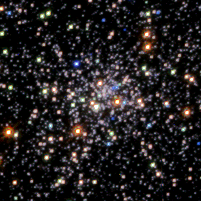

Globular Cluster M 15

This mosaic of the globular cluster M15 (fifteenth object in the Messier catalog of star clusters and nebulae) contains over 30, 000 stars. The Hubble Space Telescope probed the core of M15, the most tightly packed cluster of stars in our galaxy, to look for evidence of either a massive black hole or another remarkable phenomenon: a 'core collapse' driven by the intense gravitational pull of so many stars in such a small volume of space.

Credit: P. Guhathakurta (UCO/Lick Observatory, UC Santa Cruz), B. Yanny (Fermi National Accelerator Lab), D. Schneider (Pennsylvania State Univ.), J. Bahcall (Inst. for Advanced Study), and NASA/ESA